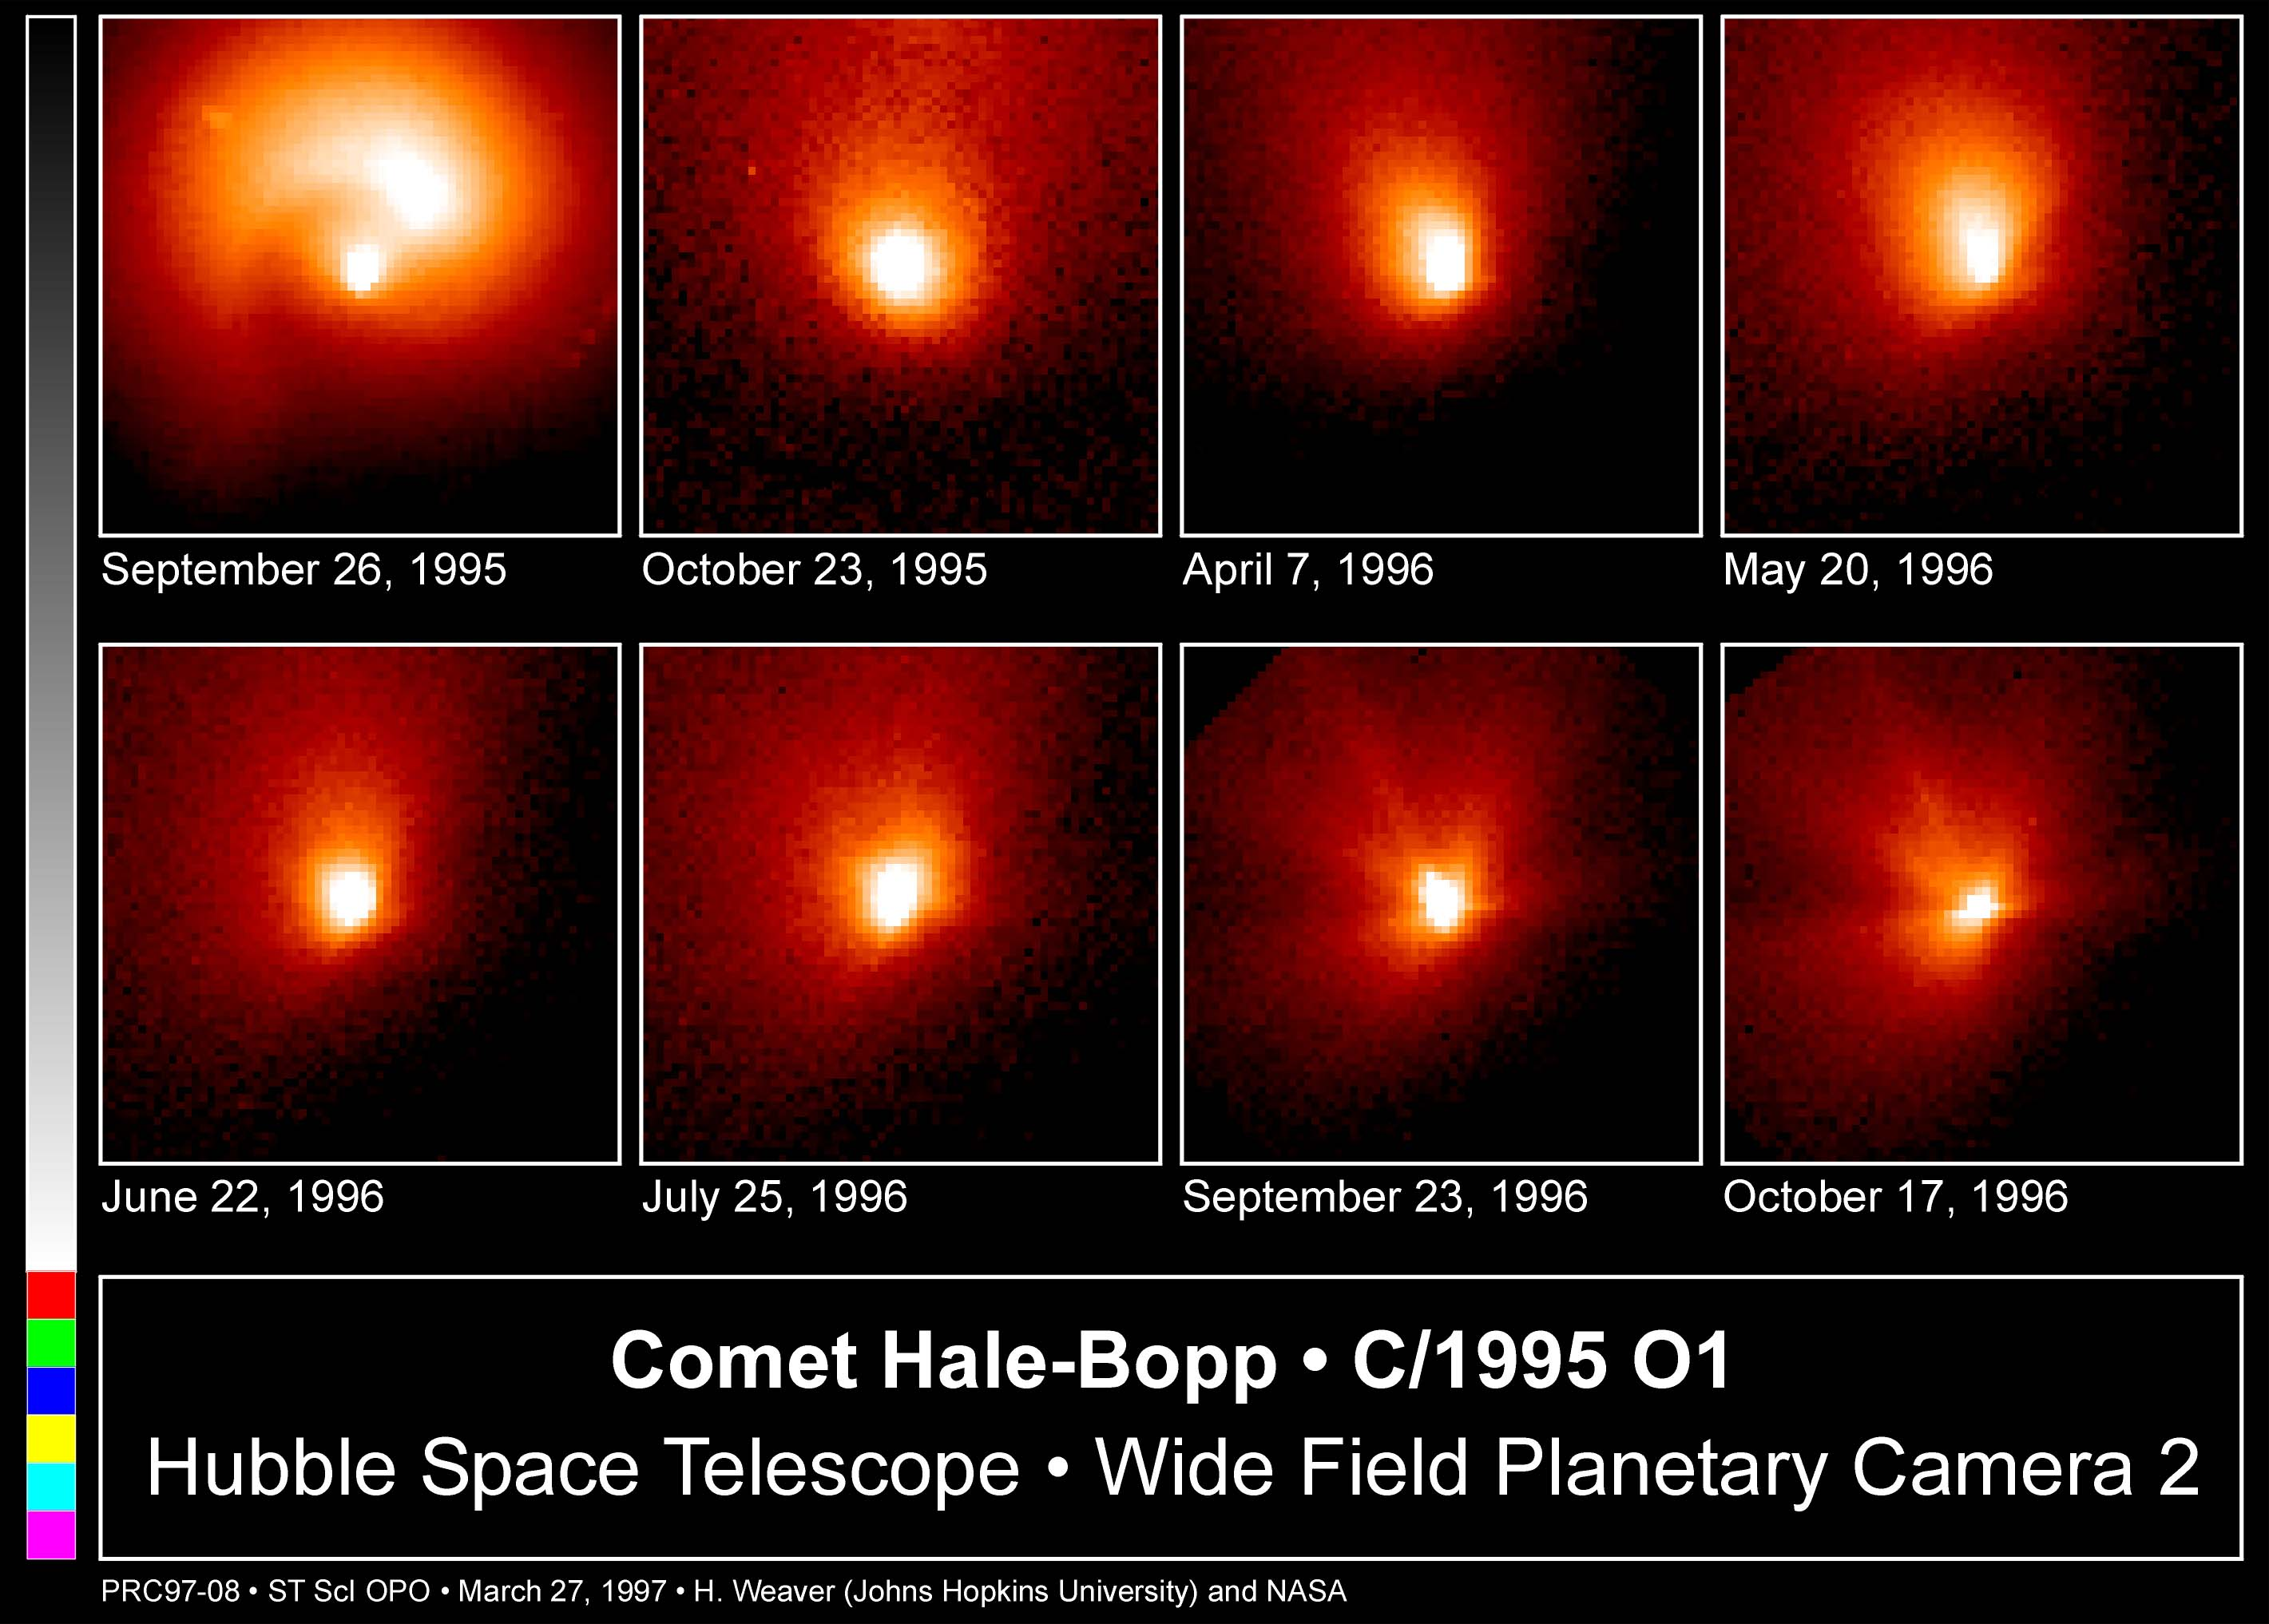

Comet Hale-Bopp

This is a series of Hubble Space Telescope observations of the region around the nucleus of Hale-Bopp, taken on eight different dates since September 1995. They chronicle changes in the evolution of the nucleus as it moves ever closer to, and is warmed by, the sun.

Credit: Harold Weaver (Johns Hopkins University) and NASA/ESA